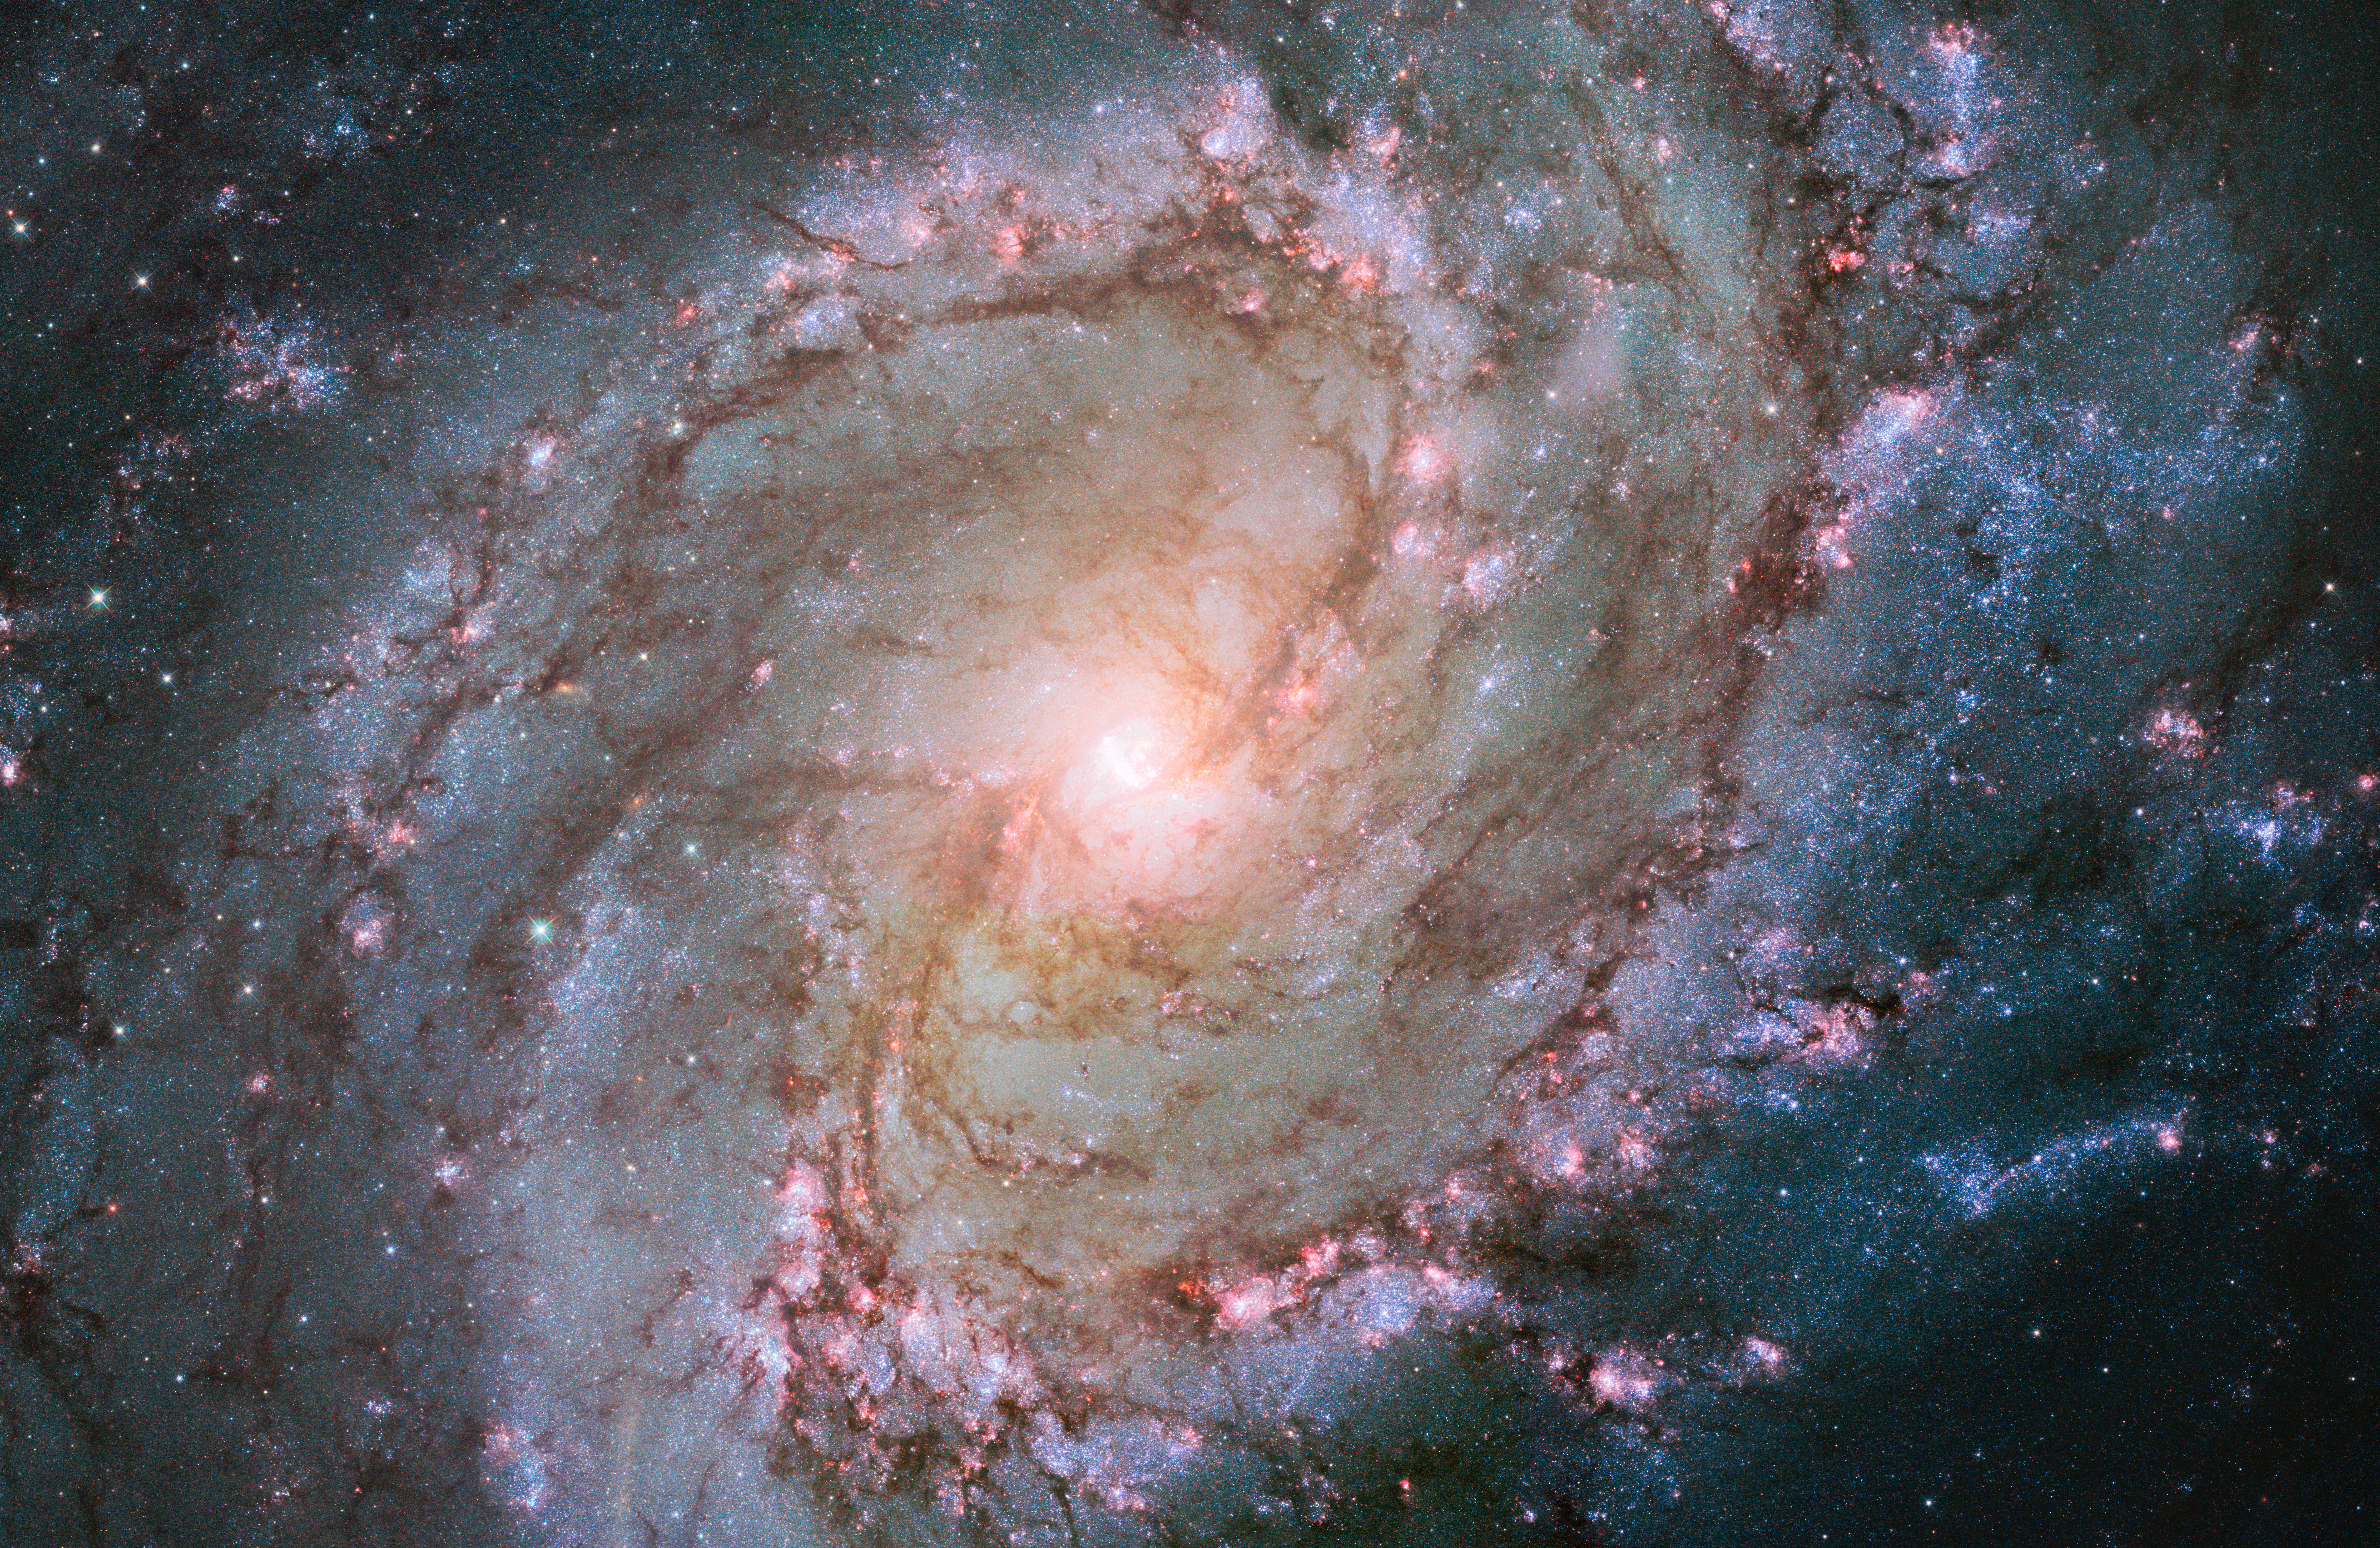

Hubble view of barred spiral galaxy Messier 83

This new Hubble image shows the scatterings of bright stars and thick dust that make up spiral galaxy Messier 83, otherwise known as the Southern Pinwheel Galaxy. One of the largest and closest barred spirals to us, this galaxy is dramatic and mysterious; it has hosted a large number of supernova explosions, and appears to have a double nucleus lurking at its core.

Credit: NASA, ESA, and the Hubble Heritage Team (STScI/AURA) Acknowledgement: William Blair (Johns Hopkins University)